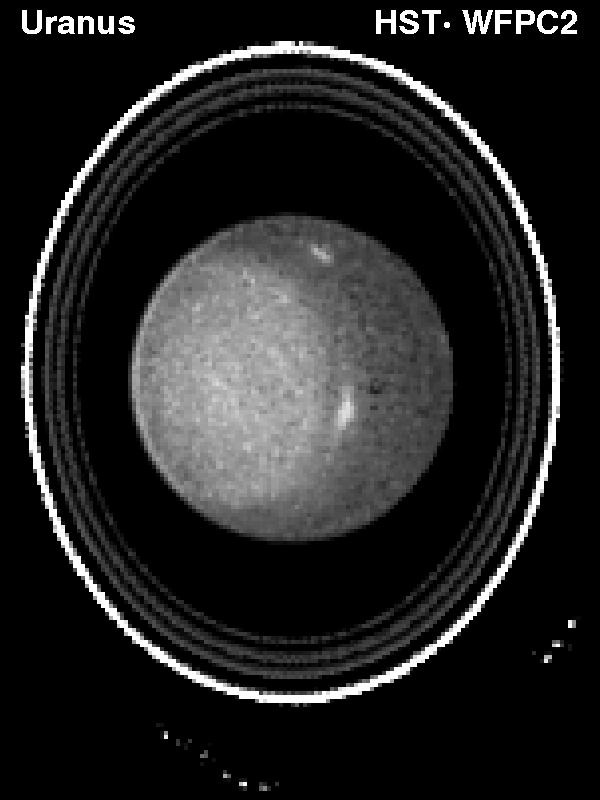

Hubble Observes the Planet Uranus

This NASA/ESA Hubble Space Telescope image of the planet Uranus revealsthe planet's rings and bright clouds and a high altitude haze above theplanet's south pole.

Hubble's new view was obtained on August 14, 1994, when Uranus was1.7 billion miles (2.8 billion kilometers) from Earth. These details, asimaged by the Wide Field Planetary Camera 2, were only previously seenby the Voyager 2 spacecraft, which flew by Uranus in 1986. Since then,none of these inner satellites has been further observed, and detailedobservations of the rings have not been possible.

Credit: Kenneth Seidelmann, U.S. Naval Observatory,and NASA/ESA